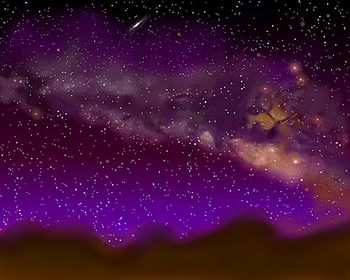

Milky Way/Andromeda collision (artist's impression)

The Hubble telescope has uncovered over 1,000 bright; young star clusters bursting to life in a brief, intense, brilliant "fireworks show" at the heart of a pair of colliding galaxies. This artist's impression shows what it may look like when the Milky Way and Andromeda collide.

Credit: James Gitlin